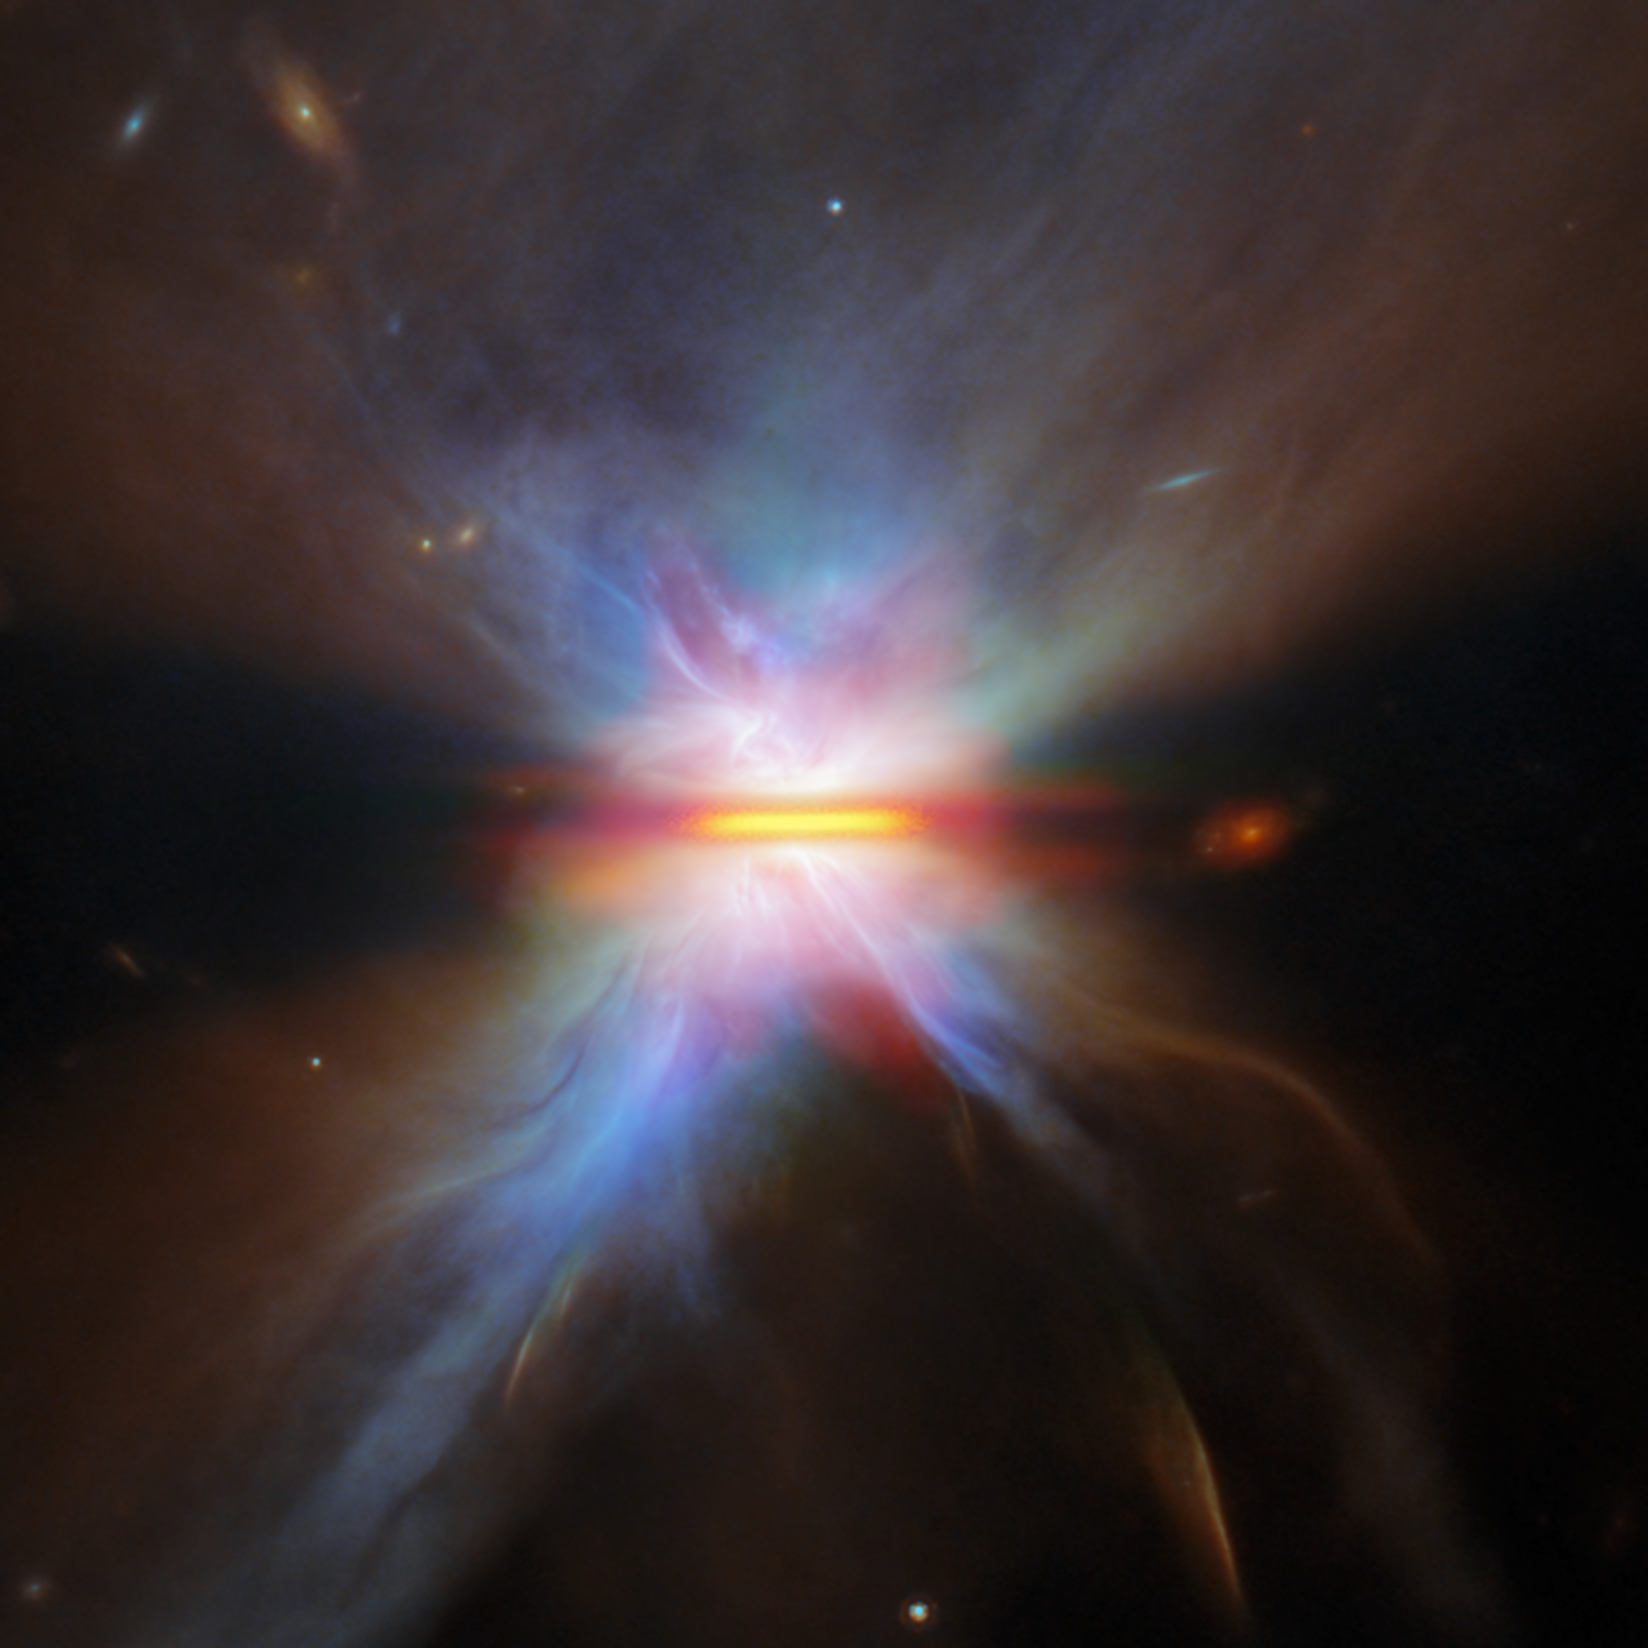

Zoom in on a dusty disc

This NASA/ESA/CSA James Webb Space Telescope provides a close-up view of IRAS 04302+2247, a planet-forming disc located about 525 light-years away in a dark cloud within the Taurus star-forming region. With Webb, researchers can study the properties and growth of dust grains within protoplanetary discs like this one, shedding light on the earliest stages of planet formation.

In stellar nurseries across the galaxy, baby stars are forming in giant clouds of cold gas. As young stars grow, the gas surrounding them collects in narrow, dusty protoplanetary discs. This sets the scene for the formation of planets, and observations of distant protoplanetary discs can help researchers understand what took place roughly 4.5 billion years ago in our own Solar System, when the Sun, Earth, and the other planets formed.

IRAS 04302+2247, or IRAS 04302 for short, is a beautiful example of a protostar - a young star that is still gathering mass from its environment - surrounded by a protoplanetary disc in which baby planets might be forming. Webb is able to measure the disc at 65 billion kilometres across - several times the diameter of our Solar System. From Webb’s vantage point, IRAS 04302’s disc is oriented edge-on, so we see it as a narrow, dark line of dusty gas that blocks the light from the budding protostar at its centre. This dusty gas is fuel for planet formation, providing an environment within which young planets can bulk up and pack on mass.

When seen face-on, protoplanetary discs can have a variety of structures like rings, gaps and spirals. These structures can be signs of baby planets that are burrowing through the dusty disc, or they can point to phenomena unrelated to planets, like gravitational instabilities or regions where dust grains are trapped. The edge-on view of IRAS 04302’s disc shows instead the vertical structure, including how thick the dusty disk is. Dust grains migrate to the midplane of the disc, settle there and form a thin, dense layer that is conducive to planet formation; the thickness of the disc is a measure of how efficient this process has been.

The dense streak of dusty gas that runs vertically across this image cocoons IRAS 04302, blotting out its bright light such that Webb can more easily image the delicate structures around it. As a result, treated to the sight of two gauzy nebulae on either side of the disc. These are reflection nebulae, illuminated by light from the central protostar reflecting off of the nebular material. Given the appearance of the two reflection nebulae, IRAS 04302 has been nicknamed the “Butterfly Star”.

This view of IRAS 04302 combines observations from Webb, the NASA/ESA Hubble Space Telescope, and the Atacama Large Millimetre/submillimetre Array (ALMA). Webb contributed data from both its Near-InfraRed Camera (NIRCam) and its Mid-InfraRed Instrument (MIRI).

Together, these three powerful facilities paint a fascinating multiwavelength portrait of a planetary birthplace. Webb reveals the distribution of tiny dust grains as well as the reflection of near-infrared light off of dusty material that extends a large distance from the disc. Hubble focuses on the dust lane as well as clumps and streaks surrounding the dust that suggest the star is still collecting mass from its surroundings as well as shooting out jets and outflows. ALMA detects the glow of larger dust grains within the disk, showing that for a disc as young as IRAS 04302, the dust has yet to settle into a narrow plane as is expected for more evolved discs.

The Webb observations of IRAS 04302 were taken as part of the Webb GO programme #2562 (PI F. Ménard, K. Stapelfeldt). This programme investigates four protoplanetary discs that are oriented edge-on from our point of view, aiming to understand how dust evolves within these discs. The growth of dust grains in protoplanetary discs is believed to be an important step toward planet formation.

Credit: ESA/Webb, NASA & CSA, M. Villenave et al.